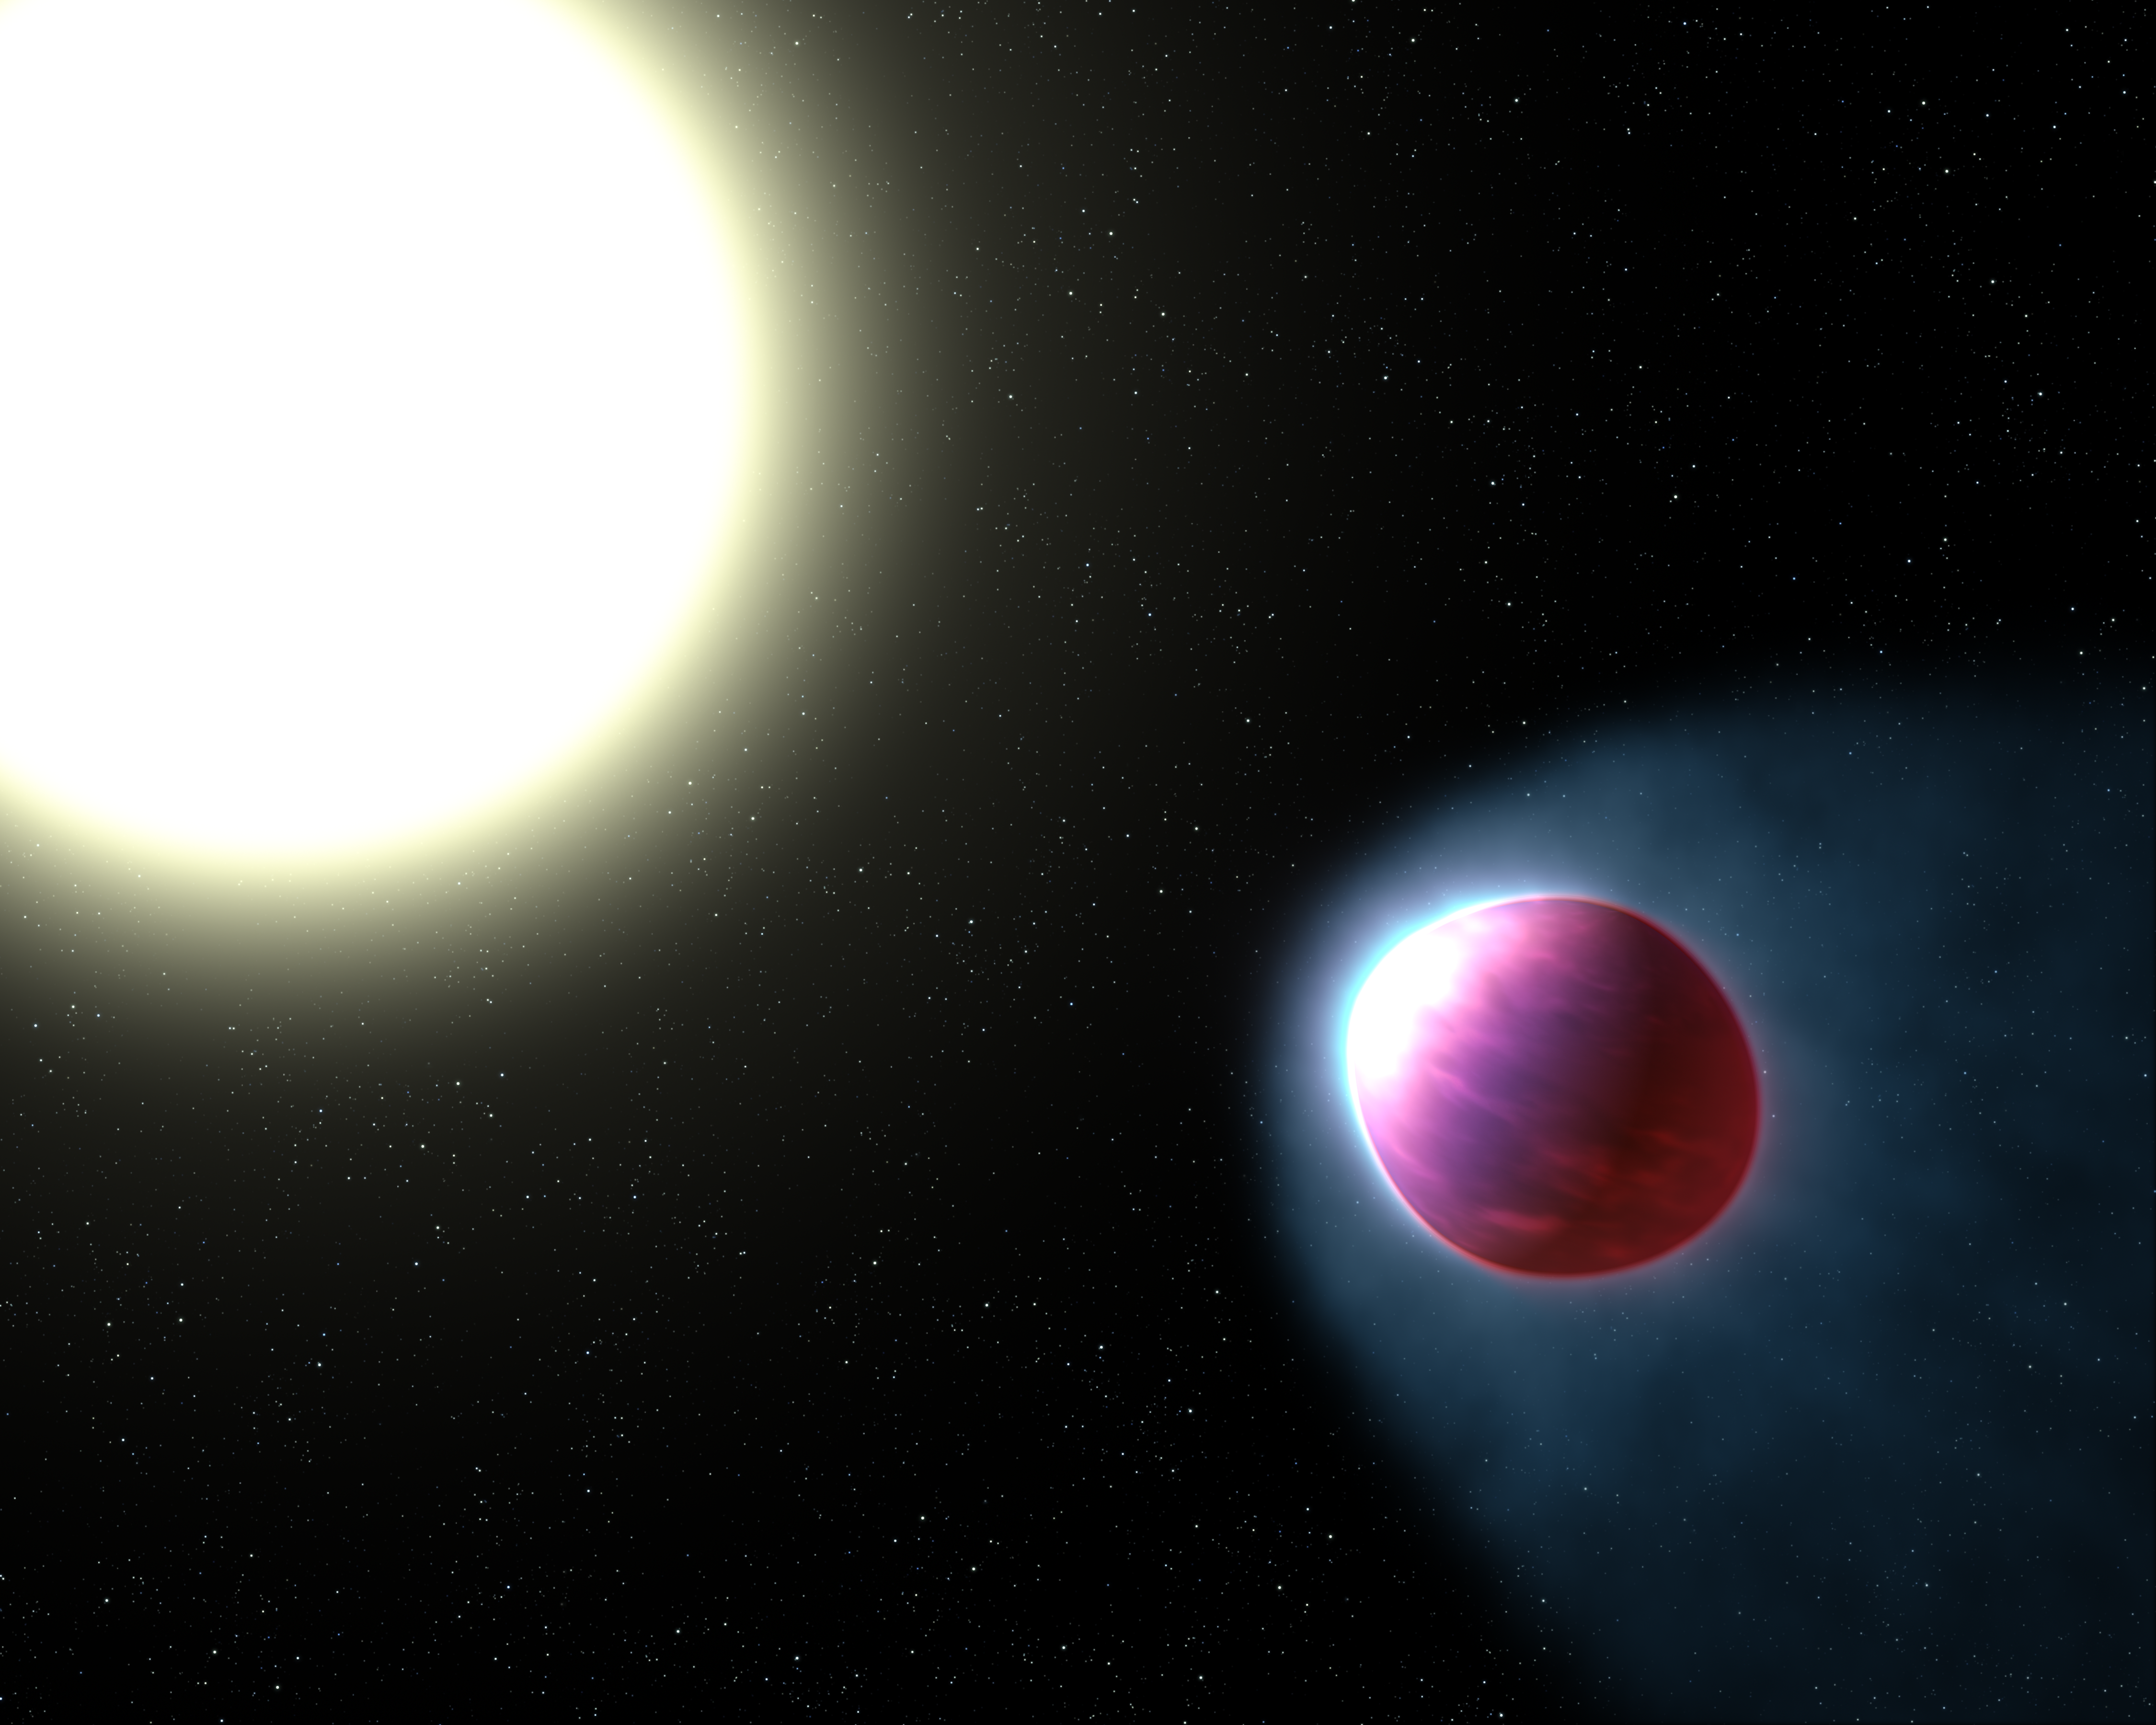

Artist's impression of WASP-121b

This is an artist’s impression of the gas giant exoplanet WASP-121b. The bloated planet is so close to its star that the tidal pull of the star stretches it into an egg shape. The top of the planet's atmosphere is heated to a blazing 2500 degrees Celsius, hot enough to boil iron. This is the first planet outside our Solar System where astronomers have found the strongest evidence yet for a stratosphere — a layer of atmosphere in which temperature increases with higher altitudes. The planet is about 900 light-years away.

Credit: NASA, ESA, and G. Bacon (STScI)